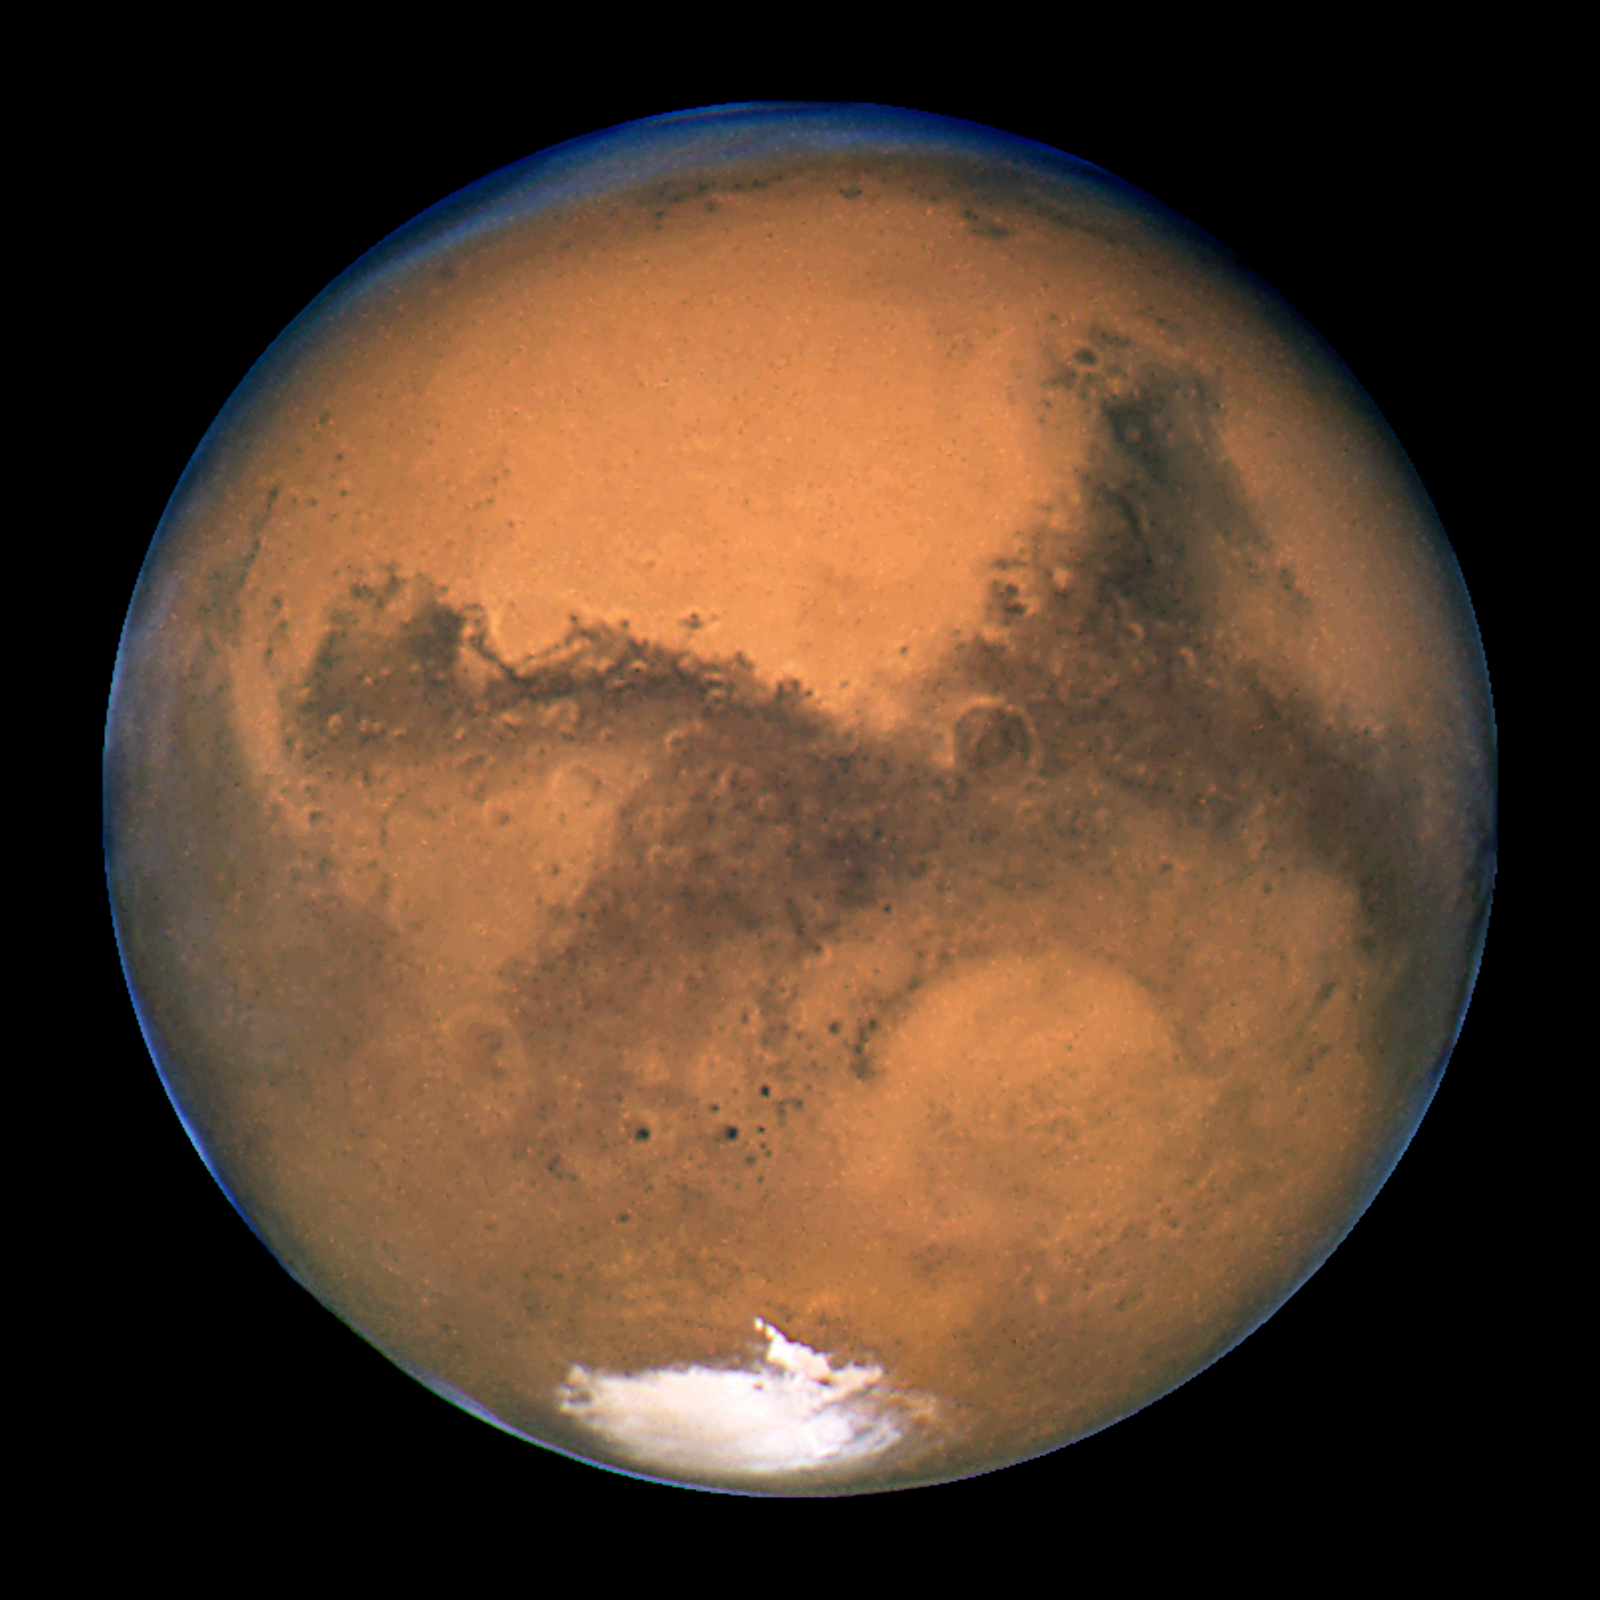

Mars near opposition 1995-2005: 2001

NASA's Hubble Space Telescope snapped this picture of Mars on October 28, within a day of its closest approach to Earth on the night of October 29. The large regional dust storm appears as the brighter, redder cloudy region in the middle of the planet's disk.

Credit: NASA, ESA, and The Hubble Heritage Team (STScI/AURA)